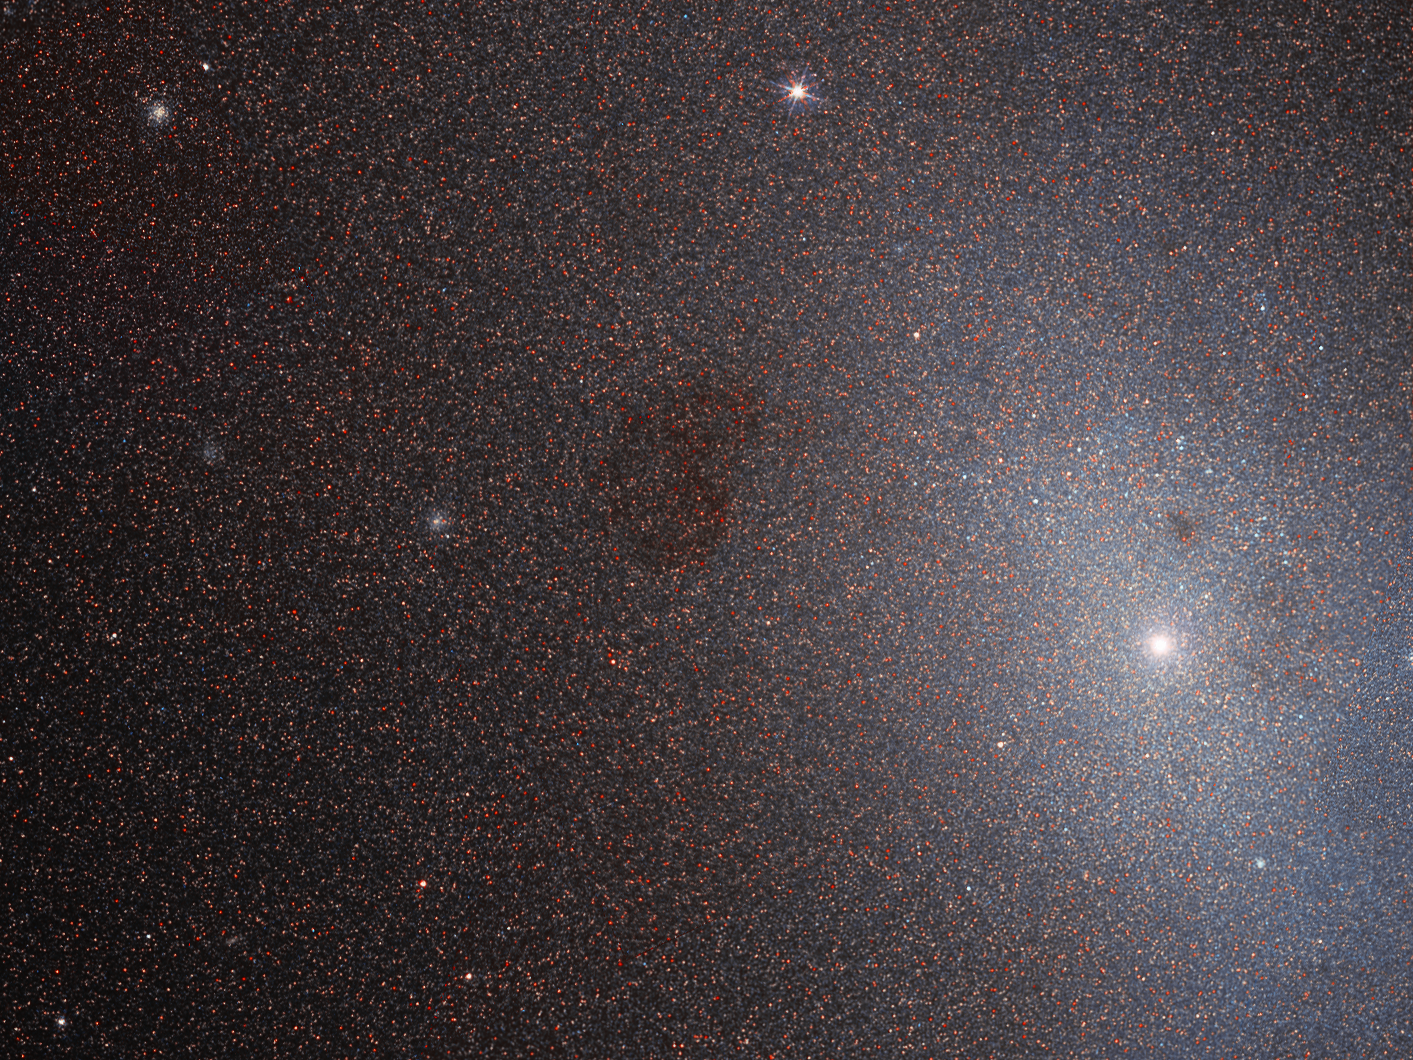

Not So Dead After All

Many of the best-loved galaxies in the cosmos are remarkably large, close, massive, bright, or beautiful, often with an unusual or intriguing structure or history. However, it takes all kinds to make a Universe — as demonstrated by this Hubble Picture of the Week of Messier 110.

Messier 110 may not look like much, but it is a fascinating near neighbour of our home galaxy, and an unusual example of its type. It is a member of the Local Group, a gathering of galaxies comprising the Milky Way and a number of the galaxies closest to it. Specifically, Messier 110 is one of the many satellite galaxies encircling the Andromeda Galaxy, the nearest major galaxy to our own, and is classified as a dwarf elliptical galaxy, meaning that it has a smooth and almost featureless structure. Elliptical galaxies lack arms and notable pockets of star formation — both characteristic features of spiral galaxies. Dwarf ellipticals are quite common in groups and clusters of galaxies, and are often satellites of larger galaxies.

Because they lack stellar nurseries and contain mostly old stars, elliptical galaxies are often considered ‘dead’ when compared to their spiral relatives. However, astronomers have spotted signs of a population of young, blue stars at the centre of Messier 110 — hinting that it may not be so dead after all.

Credit: ESA/Hubble & NASA, L.Ferrarese et al.